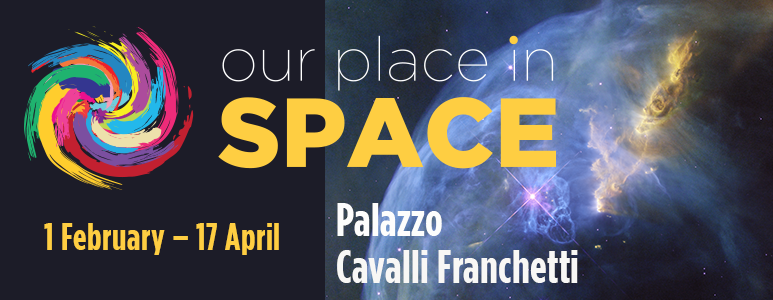

Banner for the exhibition “Our Place in Space”

Banner for the exhibition “Our Place in Space”, launching in February 2017 in the Palazzo Cavalli Franchetti in Venice, Italy.

Credit: NASA/ESA, P. Jeffris